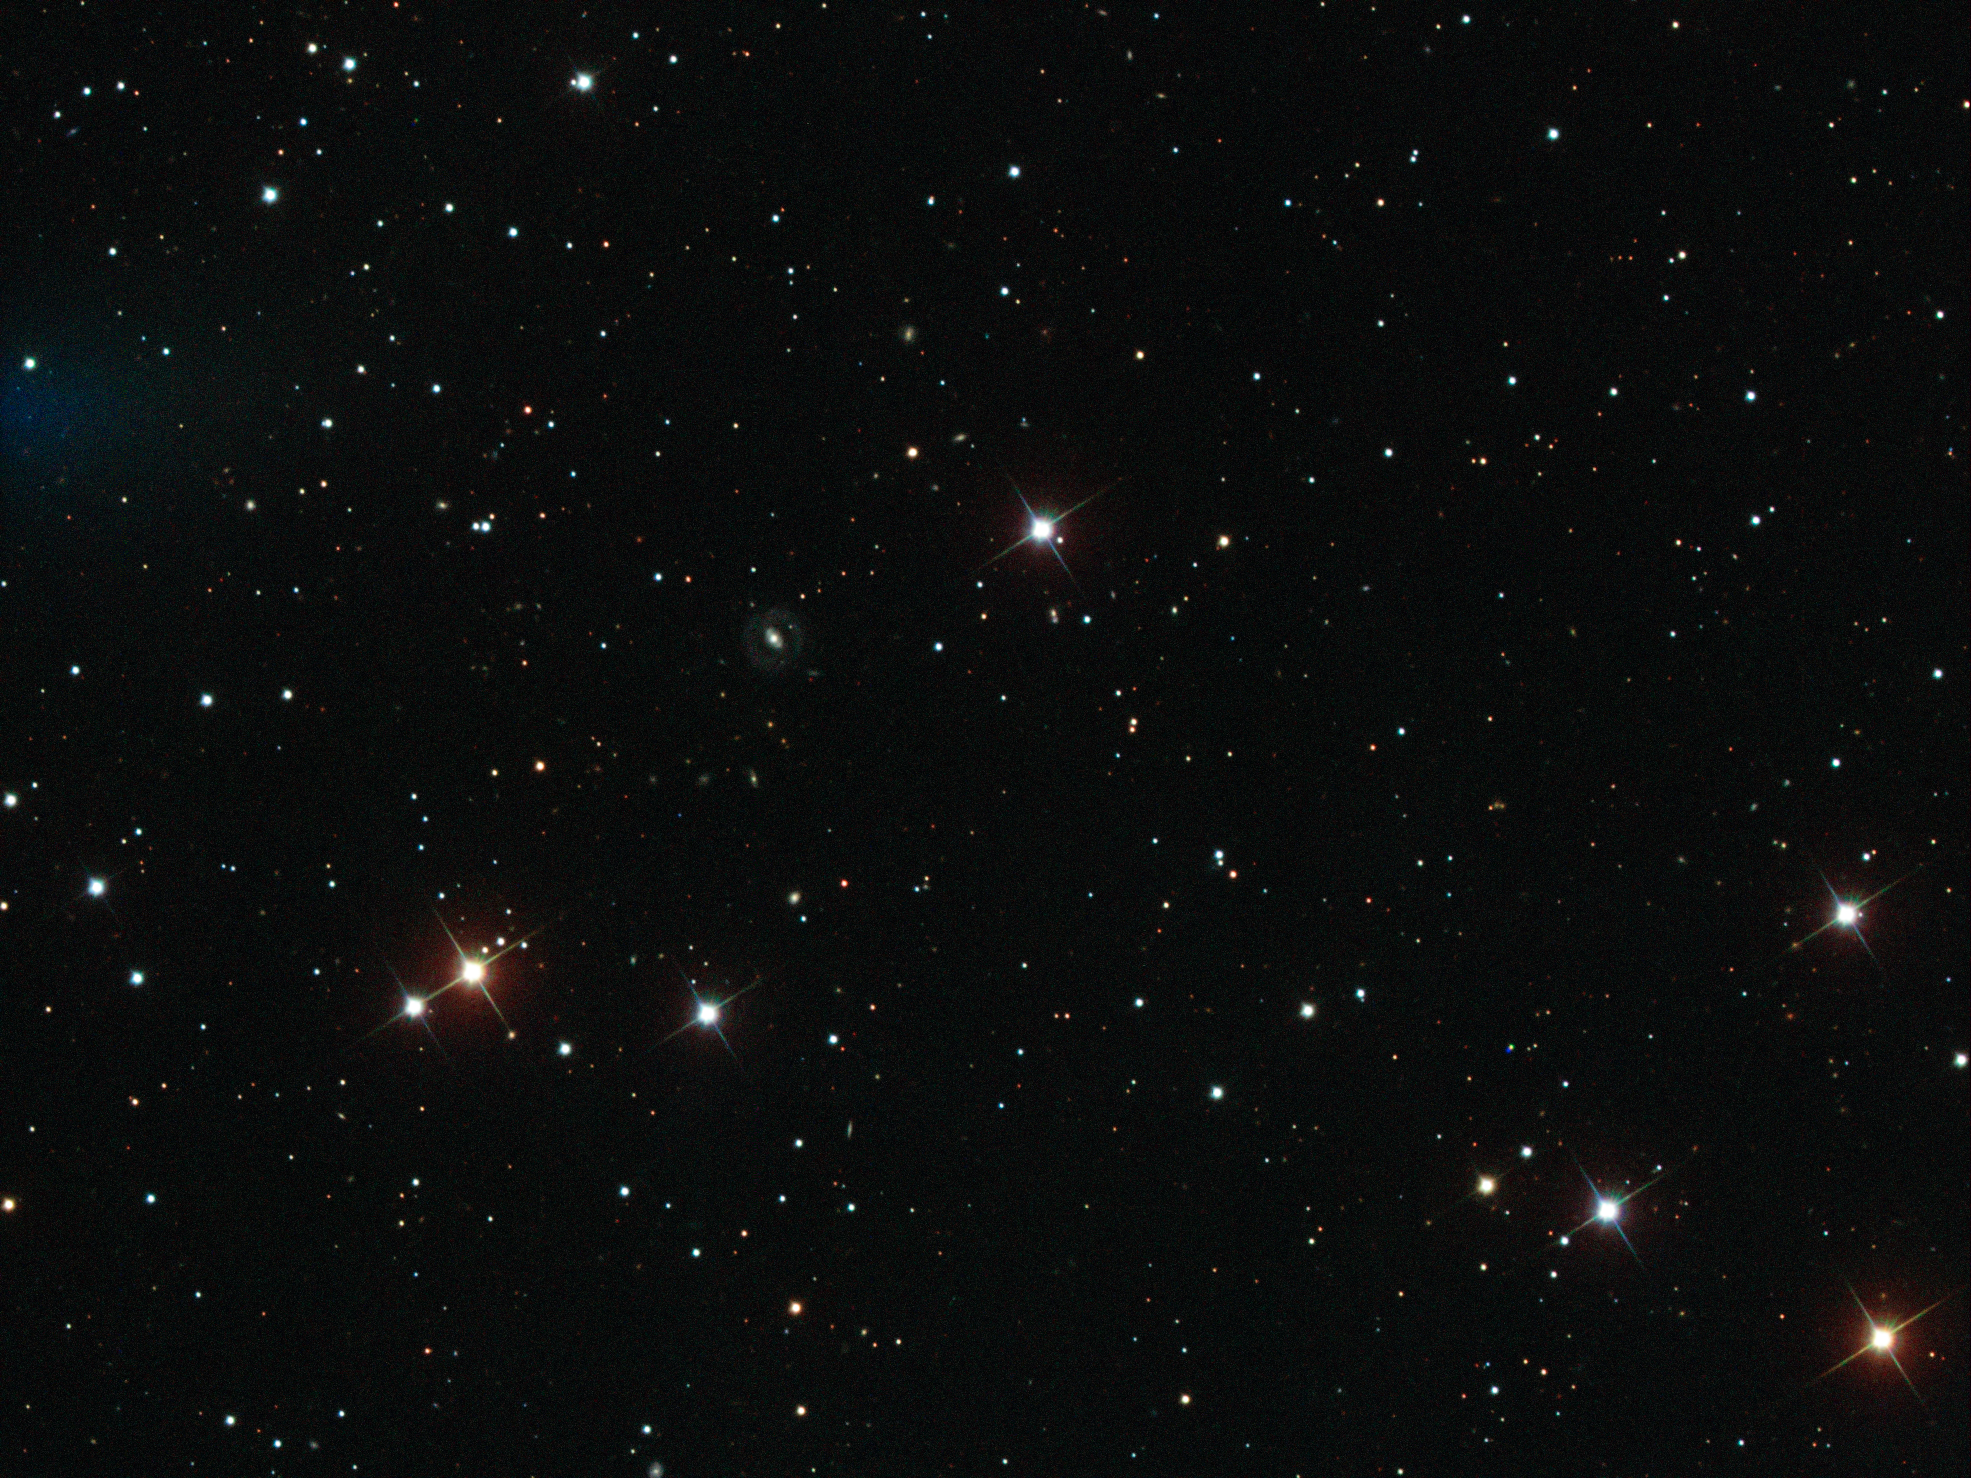

The SDSS view on iPTF16geu

Astronomers used the Sloan Digital Sky Survey (SDSS), carried out by a 2.5-metre wide-angle optical telescope at Apache Point Observatory in New Mexico, USA, to look for supernovae. The explosion named iPTF16geu can be seen left of the centre of the image as a tiny red dot.

Credit: ESA/Hubble, Sloan Digital Sky Survey